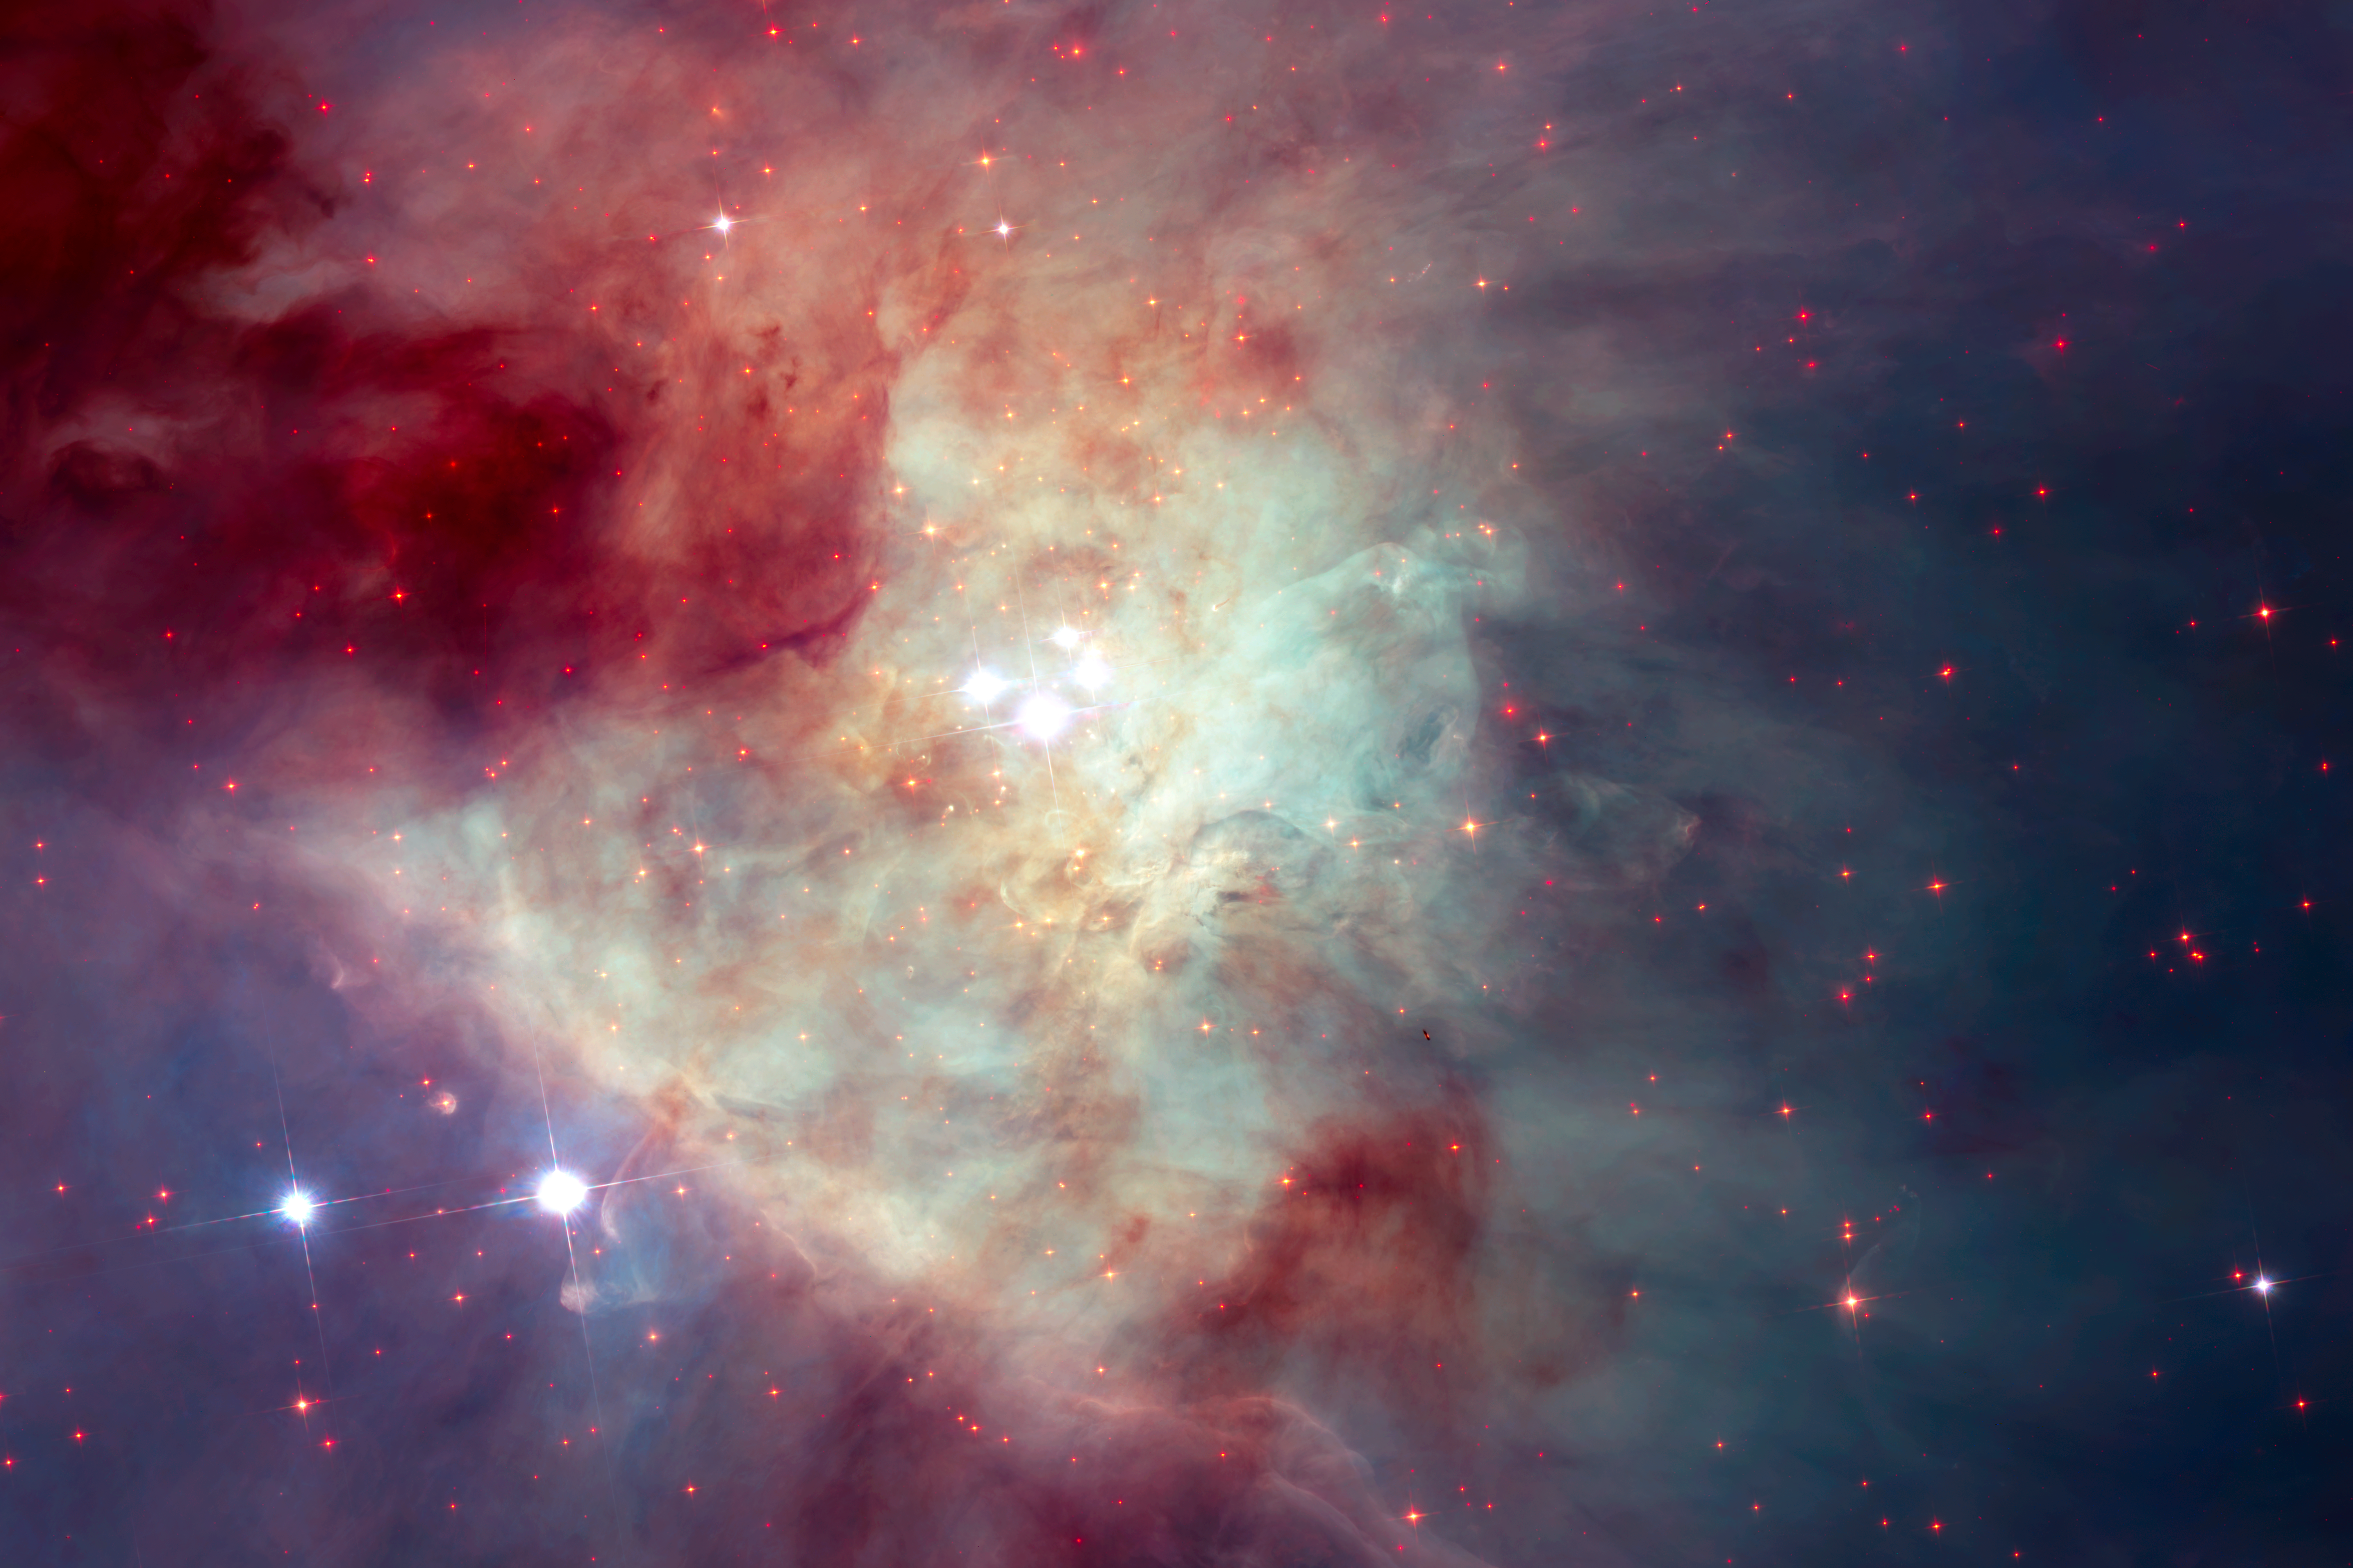

New Hubble image of Kleinmann-Low Nebula

This composite image of the Kleinmann-Low Nebula, part of the Orion Nebula complex, is composed of several pointings of the NASA/ESA Hubble Space Telescope in optical and near-infrared light. Infrared light allows to peer through the dust of the nebula and to see the stars therein. The revealed stars are shown with a bright red colour in the image.

With this image, showing the central region of the Orion Nebula, scientists were looking for rogue planets and brown dwarfs. As side-effect they found a fast-moving runaway star.

Credit: NASA, ESA/Hubble